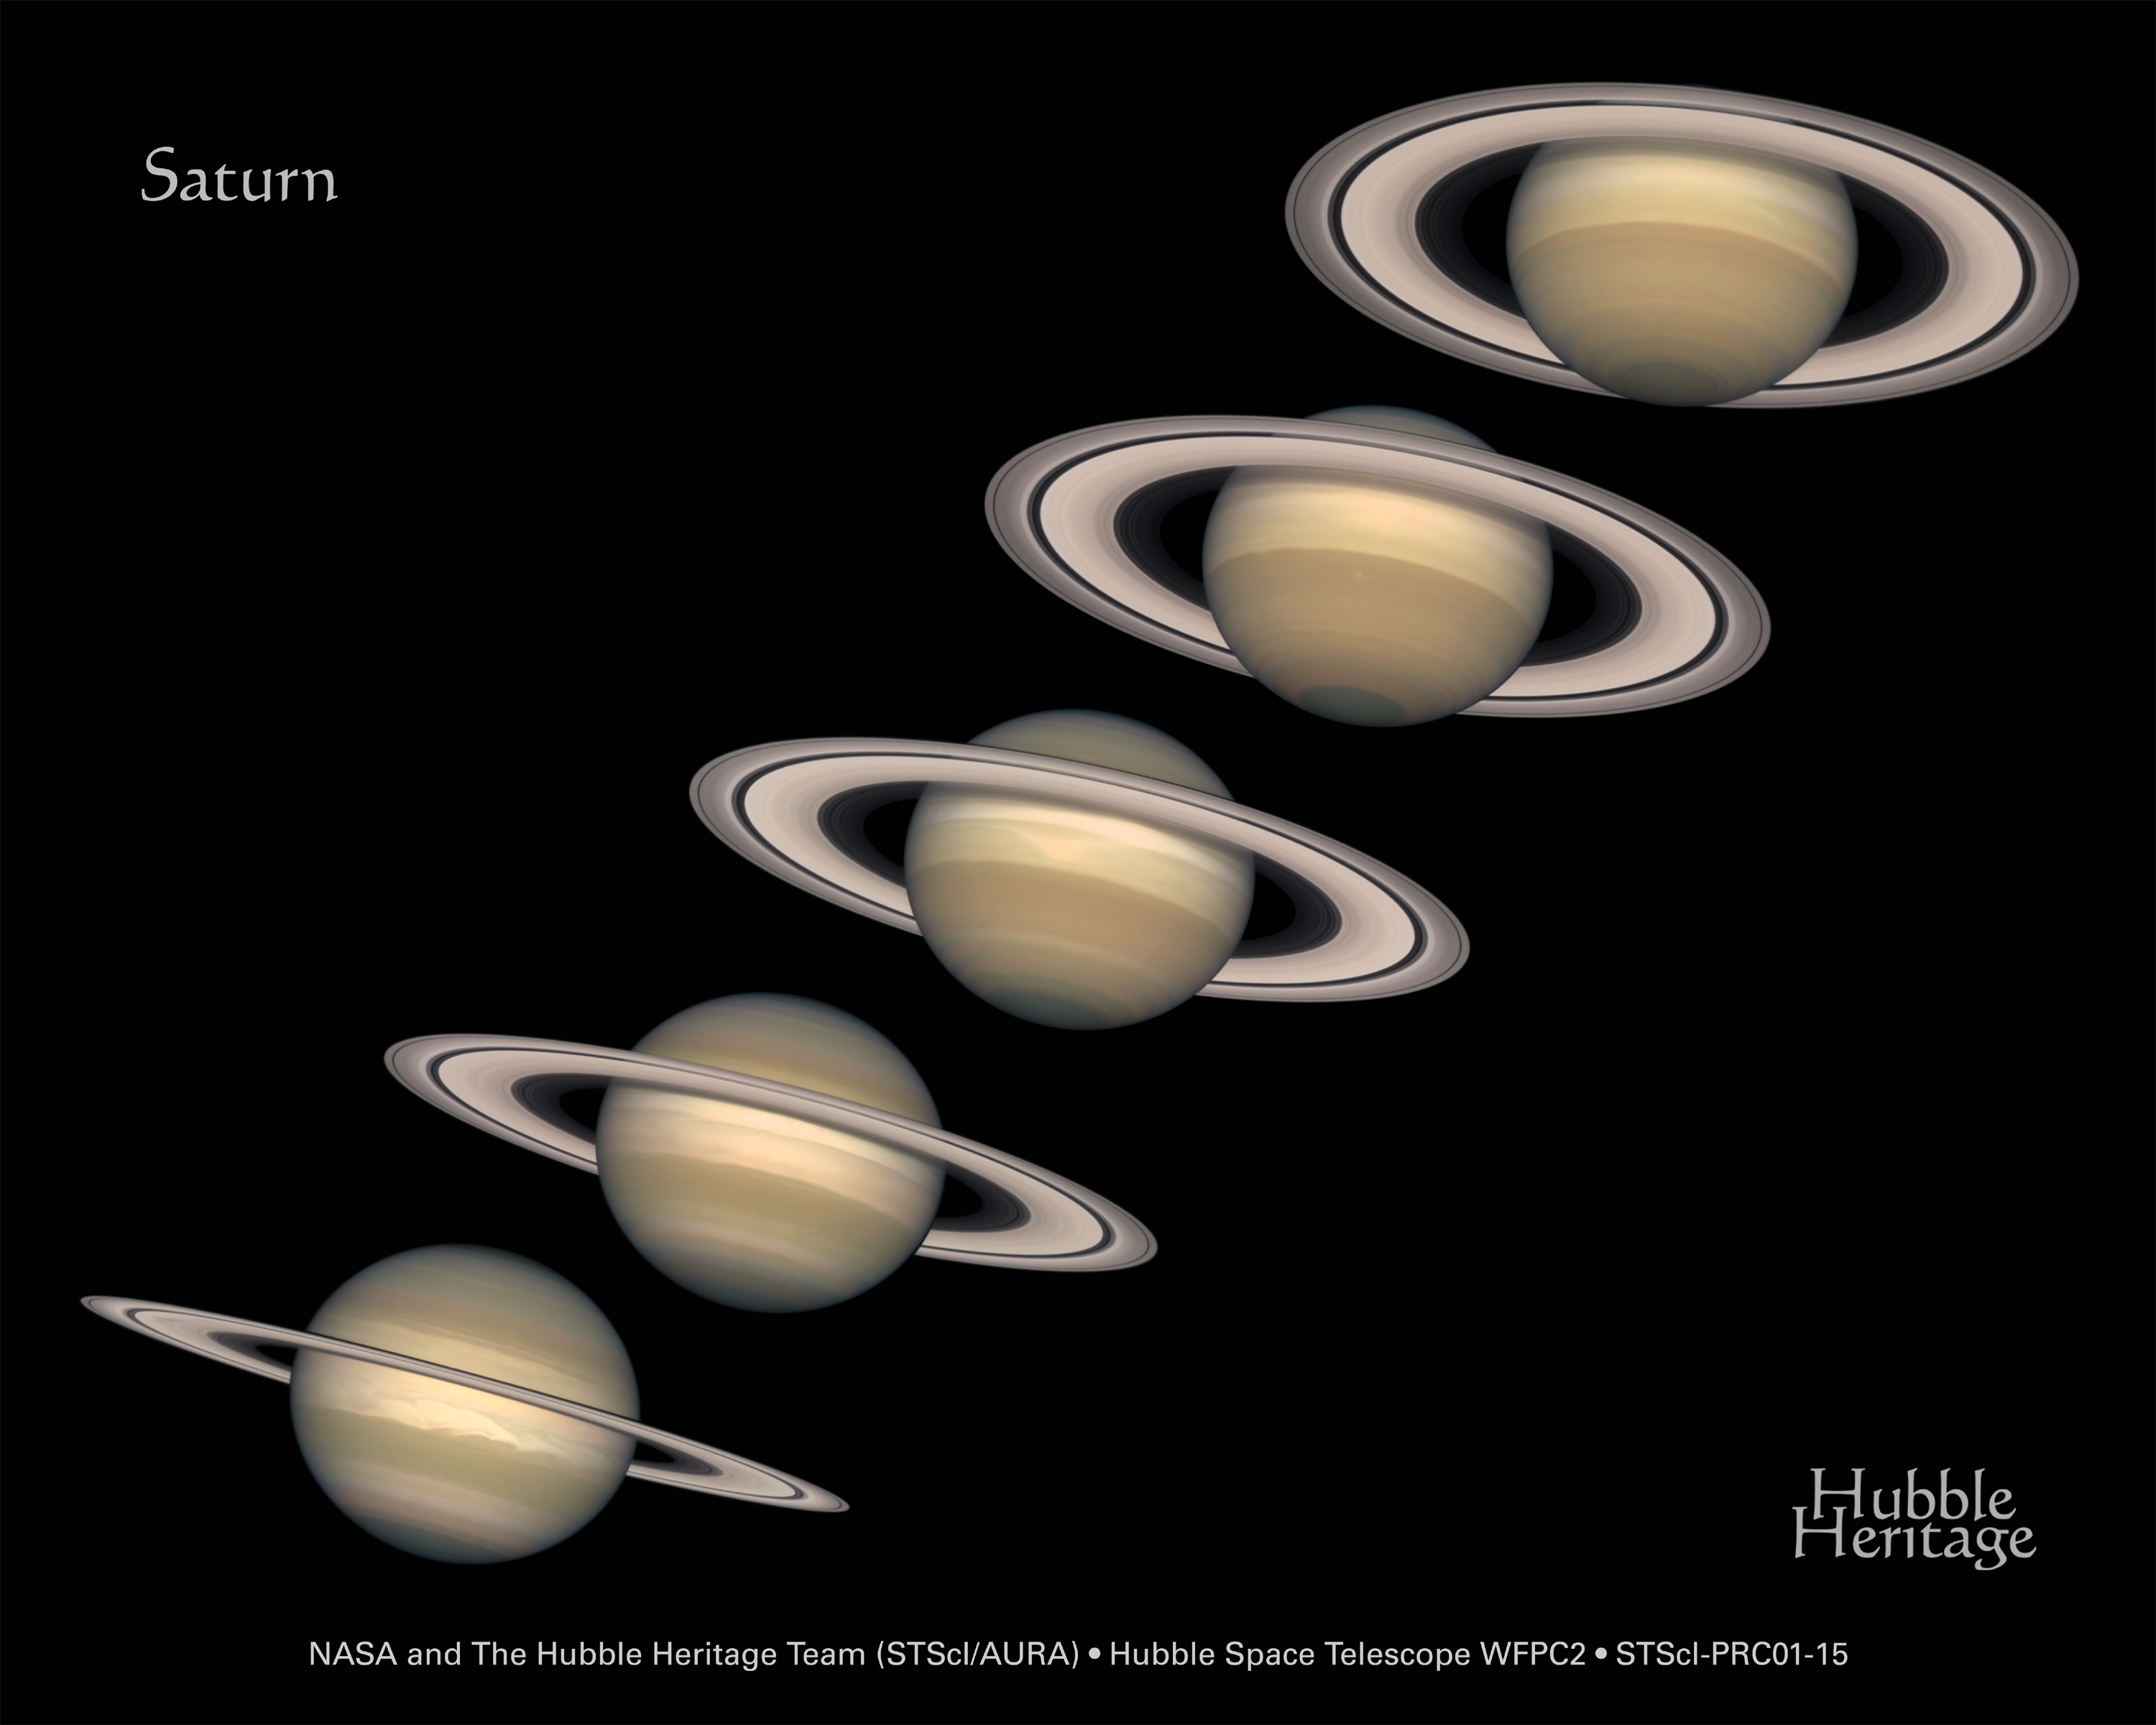

A Change of Seasons on Saturn

Looming like a giant flying saucer in our outer solar system, Saturn puts on a show as the planet and its magnificent ring system nod majestically over the course of its 29-year journey around the Sun.

These Hubble Space Telescope images, captured from 1996 to 2000, show Saturn's rings open up from just past edge-on to nearly fully open as it moves from autumn towards winter in its Northern Hemisphere.

Credit: NASA/ESA and The Hubble Heritage Team (STScI/AURA)